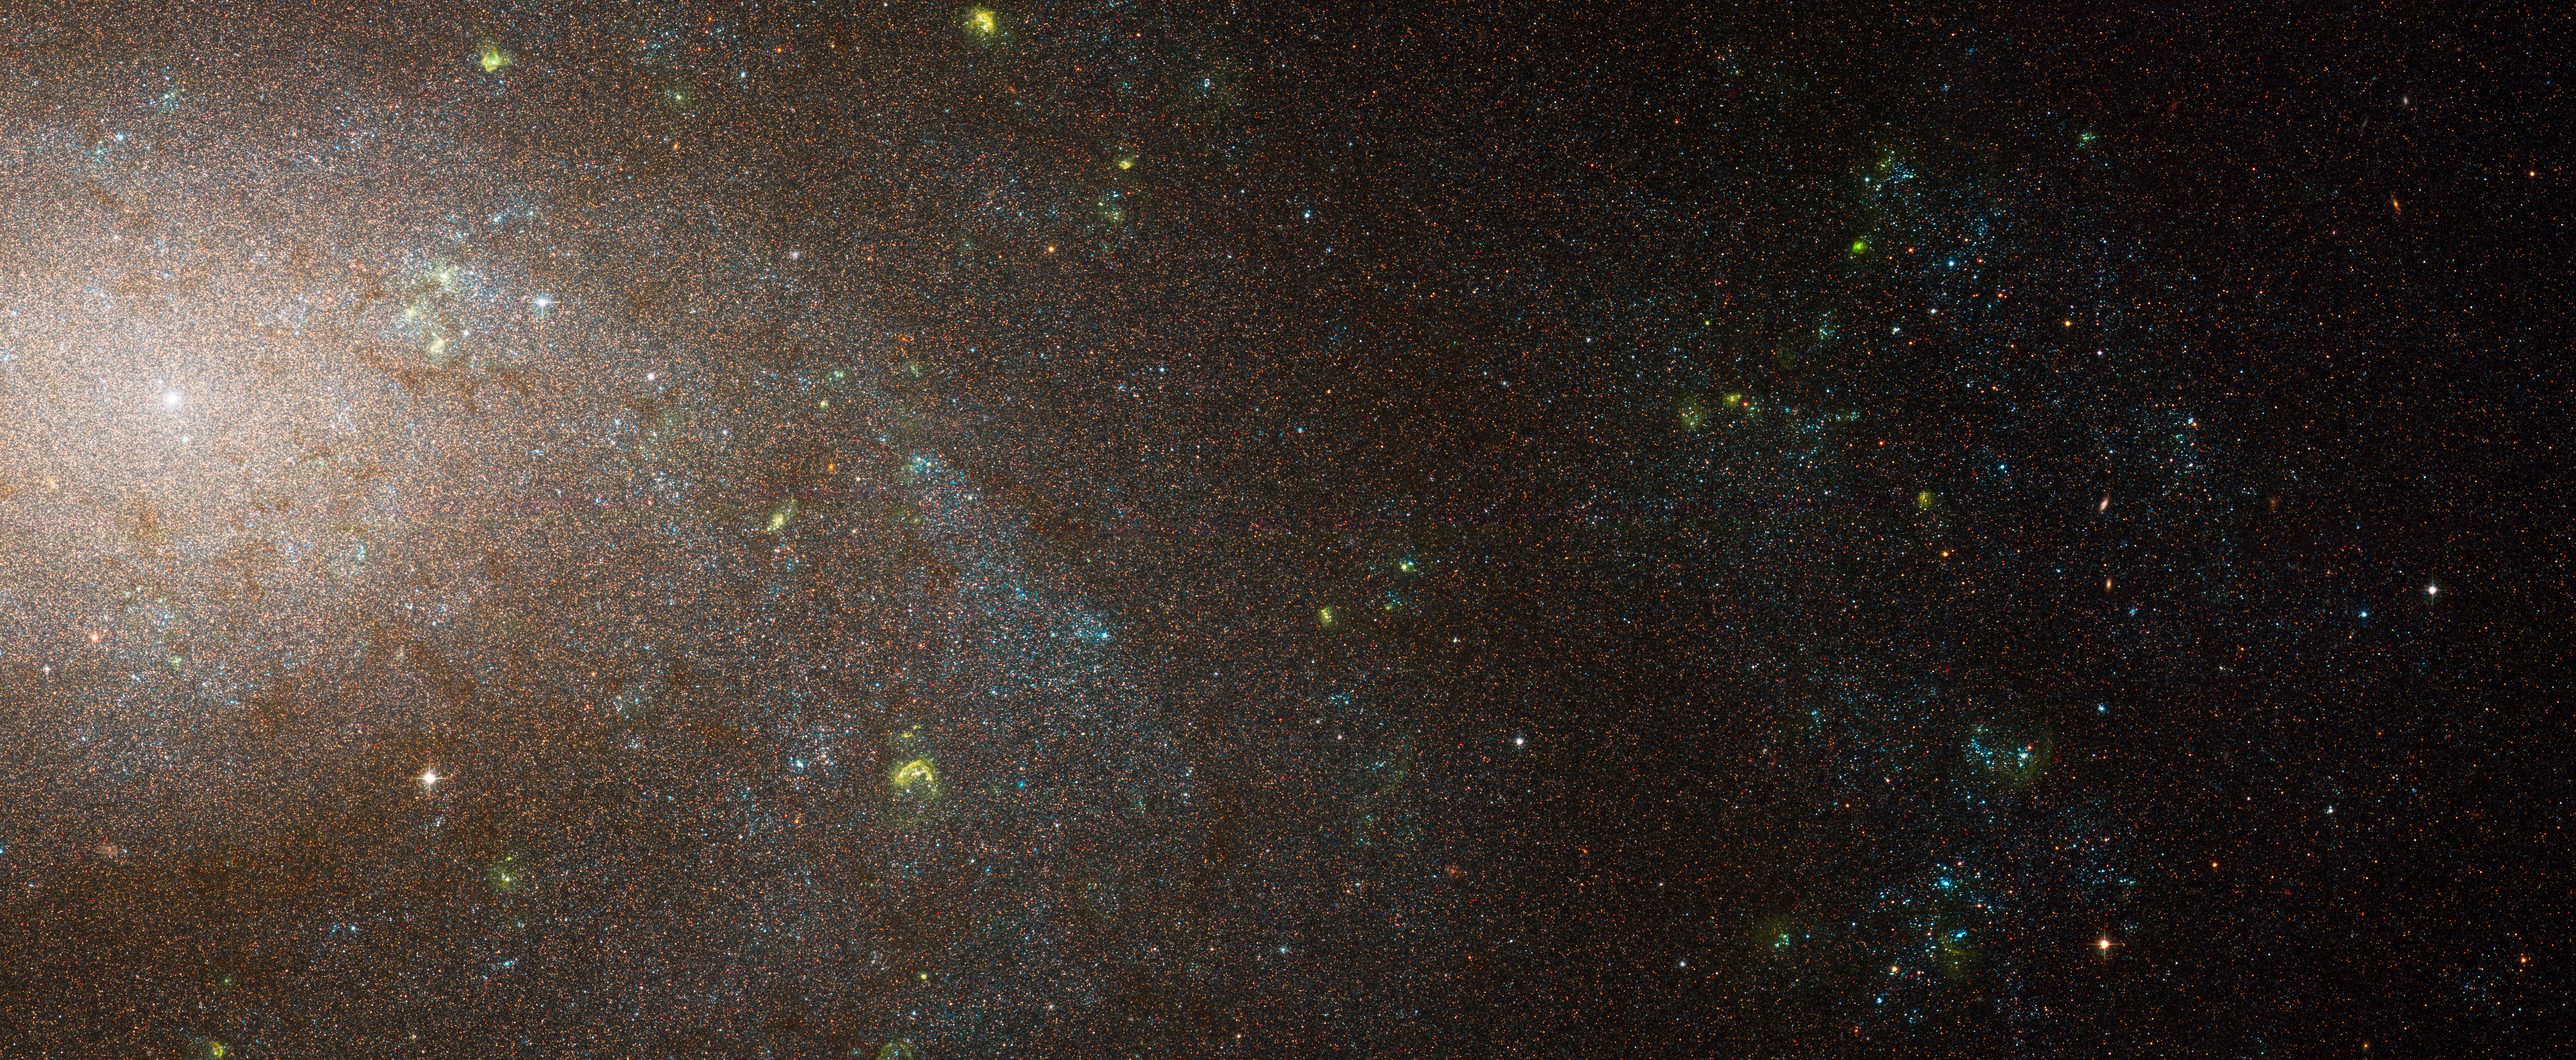

NGC 300

In this view of the spiral galaxy NGC 300, young, blue stars are concentrated in spiral arms that sweep diagonally through the image. The yellow blobs are glowing hot gas that has been heated by radiation from the nearest young, blue stars. NGC 300 is a member of the Sculptor Group of galaxies and it is located 7 million light-years away.

Credit: NASA, ESA, J. Dalcanton and B. Williams (University of Washington)